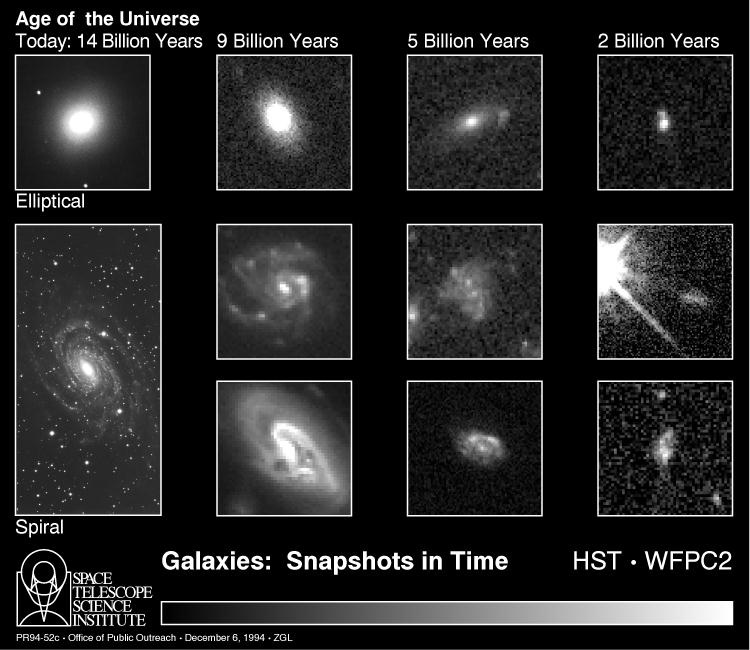

Galaxies: snapshots in time

This sequence of NASA/ESA Hubble Space Telescope (HST) images of remote galaxies offers tantalizing initial clues to the evolution of galaxies in the universe.

[far left column]
These are traditional spiral and elliptical-shaped galaxies that make up the two basic classes of island star cities that inhabit the universe we see in our current epoch (14 billion years after the birth of the universe in the Big Bang). Elliptical galaxies contain older stars, while spirals have vigorous ongoing star formation in their dusty, pancake-shaped disks. Our Milky Way galaxy is a typical spiral, or disk-shaped galaxy, on the periphery of the great Virgo cluster. Both galaxies in this column are a few tens of millions of light-years away, and therefore represent our current stage of the universe's evolution.

Credit: A. Dressler (Carnegie Institutions of Washington), M. Dickinson (STScI), D. Macchetto (ESA/STScI), M. Giavalisco (STScI), and NASA